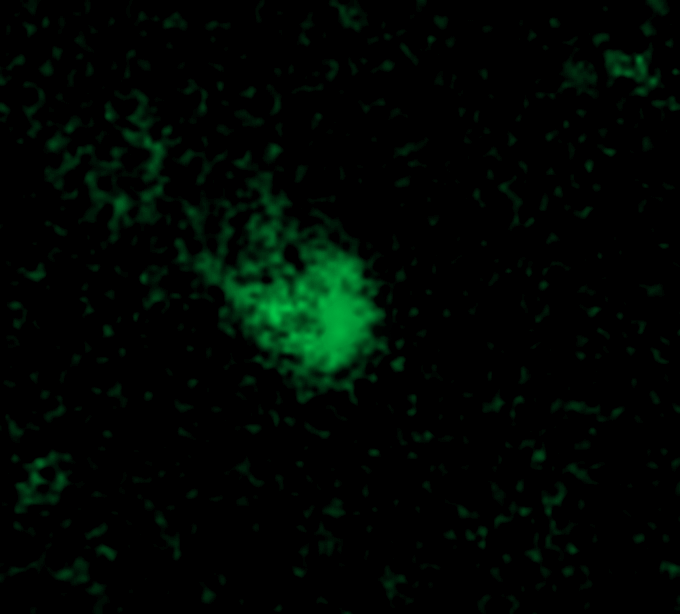

Galaxy C153 in Cluster Abell 2125 from the Ground (KPNO)

Trailing 200,000-light-year-long streamers of seething gas, a galaxy that was once like our Milky Way is being shredded as it plunges at 4.5 million miles per hour through the heart of a distant cluster of galaxies. In this unusually violent collision with ambient cluster gas, the galaxy is stripped down to its skeletal spiral arms as it is eviscerated of fresh hydrogen for making new stars.

Credit: F. Owen (NRAO), W. Keel (U. Alabama), R. Windhorst (ASU), E. Richards (U. Alabama)